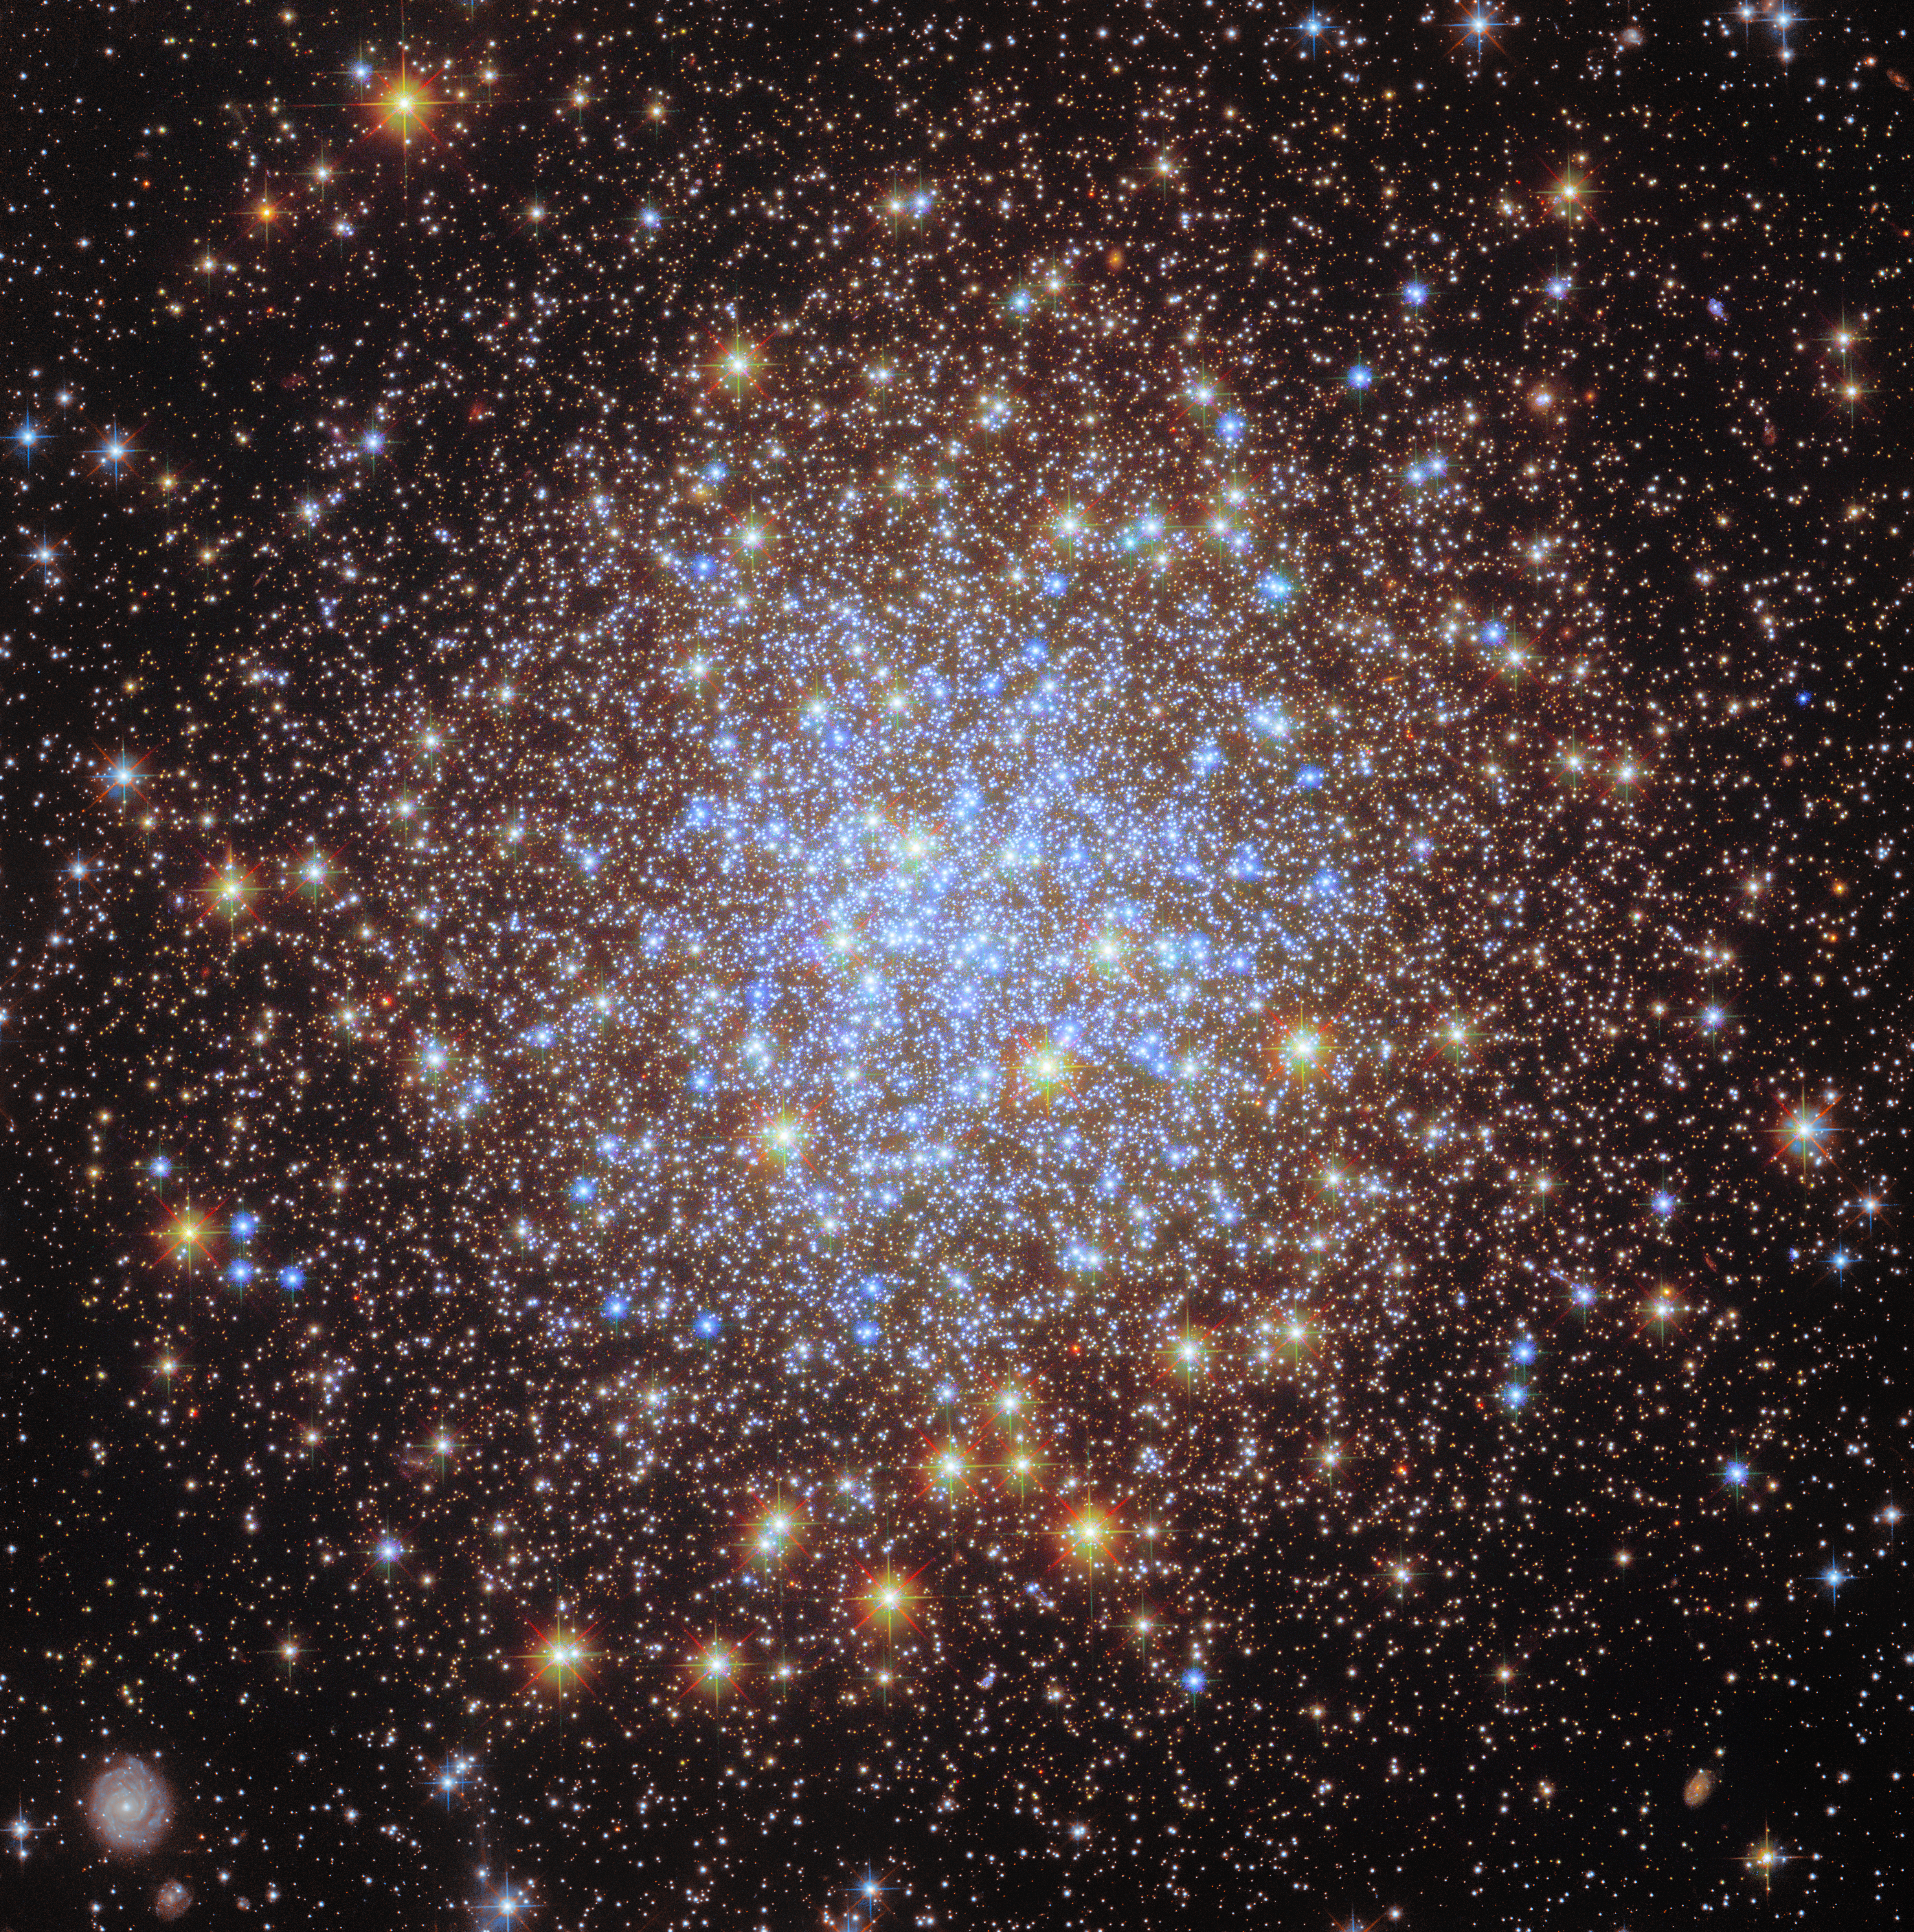

A glittering cluster shines again

As part of ESA/Hubble’s 35th anniversary celebrations, a new image series has been shared throughout April to revisit stunning Hubble targets that were previously released. New images of NGC 346, the Sombrero Galaxy, and the Eagle Nebula have already been published. Now, ESA/Hubble is revisiting the star cluster Messier 72 (M72) with new data and image processing techniques.

M72 is a particularly special target because it was the first image ever published in the ESA/Hubble Picture of the Week series, on 22 April 2010. For fifteen years, the ESA/Hubble team has been publishing a new Hubble image every Monday for everyone to enjoy. This has resulted in nearly 800 images being added to the vast Hubble image archive over the years.

M72 is a collection of stars, formally known as a globular cluster, located in the constellation Aquarius roughly 50 000 light years from Earth. The intense gravitational attraction between the closely packed stars gives globular clusters their regular, spherical shape. Roughly 150 clusters such as this have been discovered in the Milky Way galaxy.

The striking variety in the colour of the stars in this image of M72, particularly compared to the original image, results from adding ultraviolet observations to the previous visible-light data. The colours indicate groups of different types of stars. Blue stars are those in the cluster that were originally more massive, and have now reached hotter temperatures after burning through much of their hydrogen fuel; the bright red objects are lower-mass stars that have now become red giants. Studying these different groups help astronomers to understand how globular clusters, and the galaxies they were born in, initially formed.

Pierre Méchain, a French astronomer and colleague of Charles Messier, discovered M72 in 1780. It was the first of five star clusters that Méchain would discover while assisting Messier. It was recorded as the 72nd entry in Messier’s famous collection of astronomical objects, and the object is also one of the most remote clusters in the catalogue.

The ESA/Hubble science outreach team invites members of the public as well as all scientists who have had (or will have) approved Hubble observing time to contact us if you feel you have aesthetically appealing yet visually informative image data that could be featured in this series!

Credit: ESA/Hubble & NASA, A. Sarajedini, G. Piotto, M. Libralato